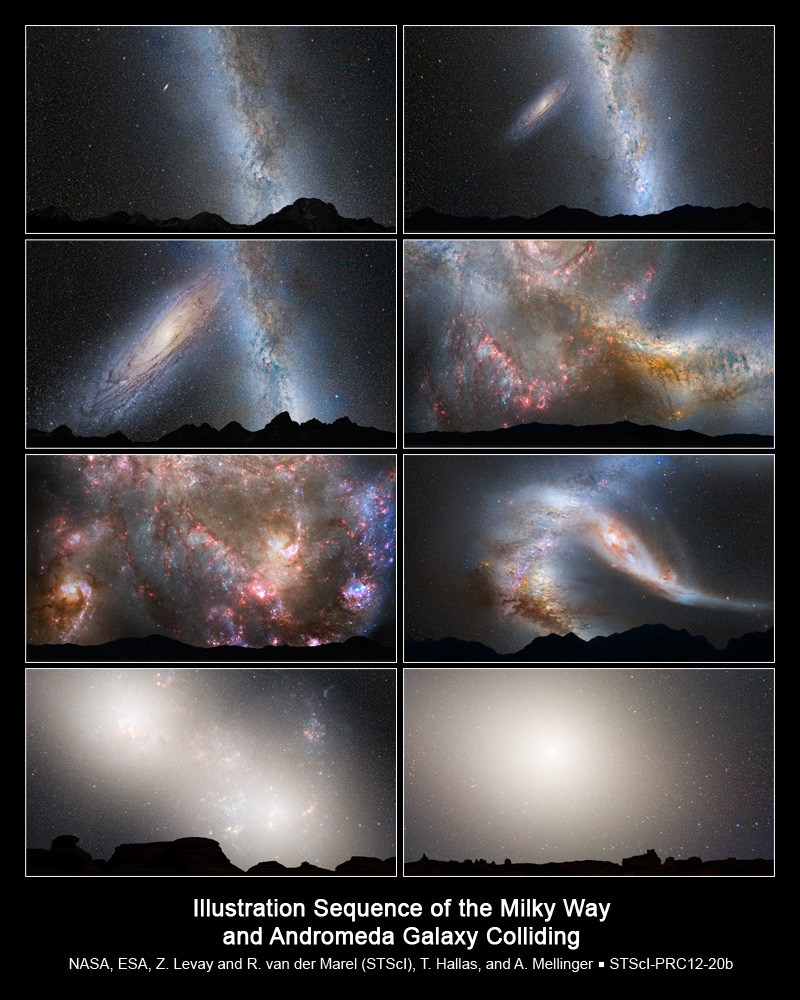

Nighttime Sky View of Future Galaxy Merger

This series of photo illustrations shows the predicted merger between our Milky Way galaxy and the neighbouring Andromeda galaxy, as it will unfold over the next several billion years. The sequence is inspired by dynamical computer modelling of the inevitable future collision between the two galaxies.

First Row, Left Panel: Present Day — This is a nighttime view of the current sky, with the bright belt of our Milky Way. The Andromeda galaxy lies 2.5 million light-years away and looks like a faint spindle, several times the diameter of the full Moon.

First Row, Right Panel: 2 Billion Years — The disk of the approaching Andromeda galaxy is noticeably larger.

Second Row, Left Panel: 3.75 Billion Years — Andromeda fills the field of view. The Milky Way begins to show distortion due to tidal pull from Andromeda.

Second Row, Right Panel, and Third Row, Left Panel: 3.85-3.9 Billion Years — During the first close approach, the sky is ablaze with new star formation, which is evident in a plethora of emission nebulae and open young star clusters.

Third Row, Right Panel: 4 Billion Years — After its first close pass, Andromeda is tidally stretched out. The Milky Way, too, becomes warped.

Fourth Row, Left Panel: 5.1 Billion Years — During the second close passage, the cores of the Milky Way and Andromeda appear as a pair of bright lobes. Star-forming nebulae are much less prominent because the interstellar gas and dust has been significantly decreased by previous bursts of star formation.

Fourth Row, Right Panel: 7 Billion Years — The merged galaxies form a huge elliptical galaxy, its bright core dominating the nighttime sky. Scoured of dust and gas, the newly merged elliptical galaxy no longer makes stars and no nebulae appear in the sky. The ageing starry population is no longer concentrated along a plane, but instead fills an ellipsoidal volume.

NOTE: These illustrations depict the view from about 25,000 light-years away from the centre of the Milky Way. The future view from our solar system will most likely be markedly different, depending on how the Sun's orbit within the galaxy changes during the collision.

Credit: NASA, ESA, Z. Levay and R. van der Marel (STScI), T. Hallas, and A. Mellinger